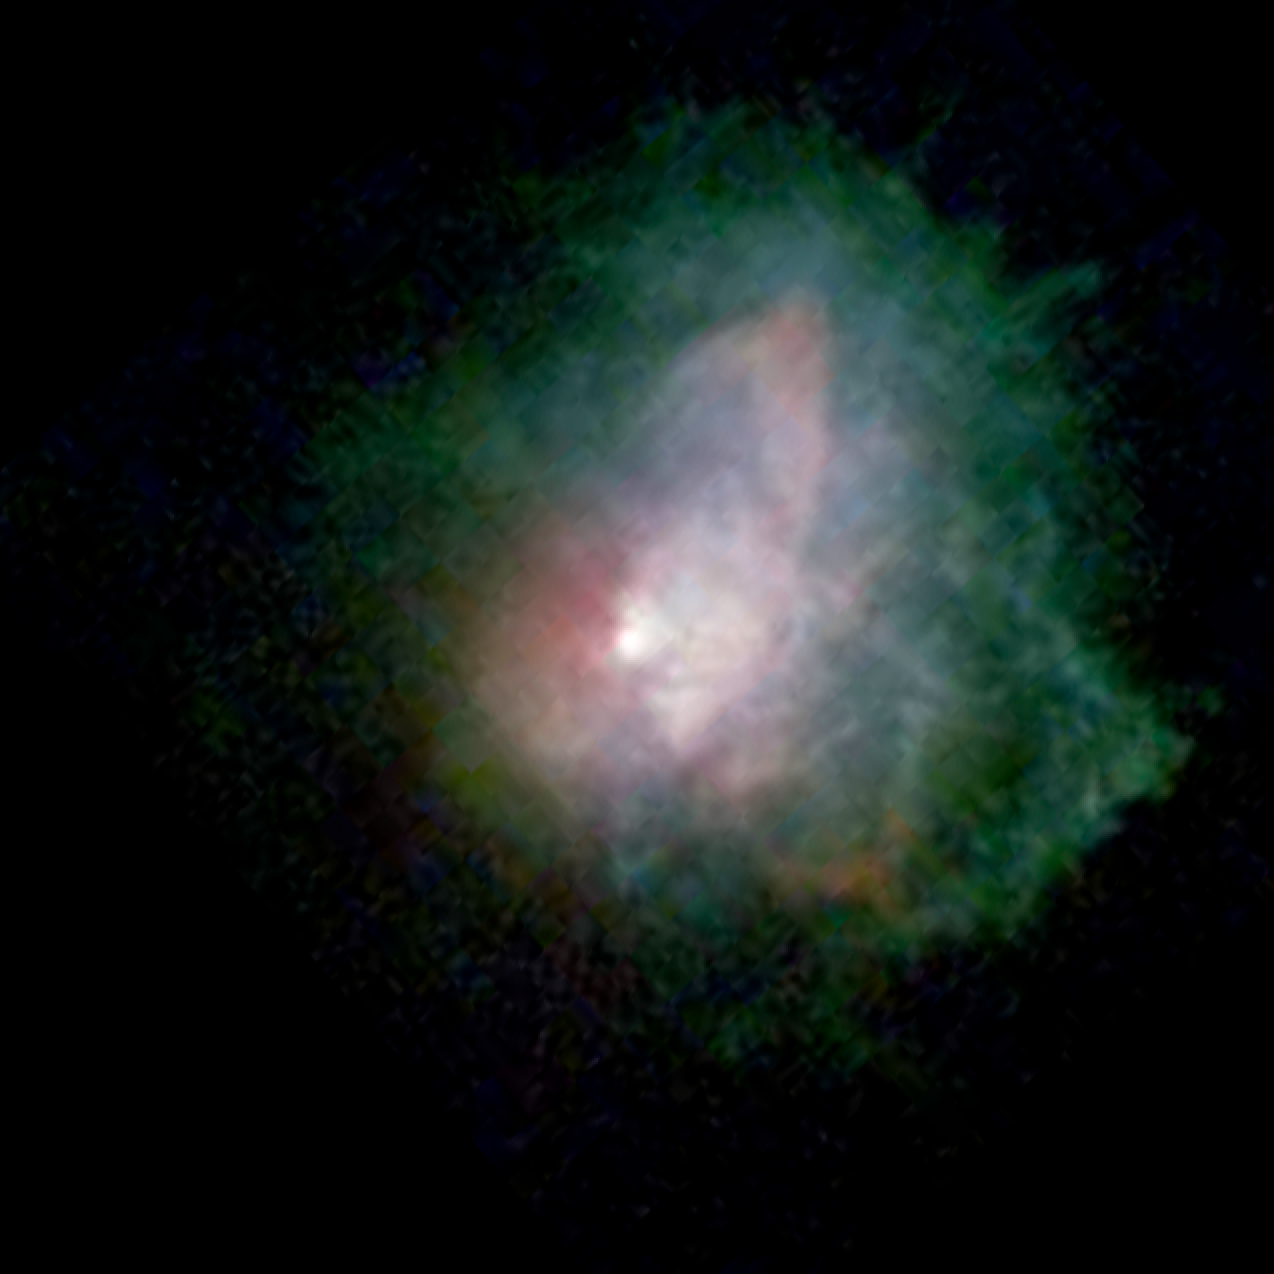

Massive Star VY Canis Majoris - Visible Light

Using NASA's Hubble Space Telescope and the W.M. Keck Observatory, Kameula, Hawaii, astronomers have learned that the gaseous outflow from one of the brightest super-sized stars in the sky is more complex than originally thought.

The outbursts are from VY Canis Majoris, a red supergiant star that is also classified as a hypergiant because of its very high luminosity. The eruptions have formed loops, arcs, and knots of material moving at various speeds and in many different directions. The star has had many outbursts over the past 1,000 years as it nears the end of its life.

Credit: NASA/ESA and R. Humphreys (University of Minnesota)